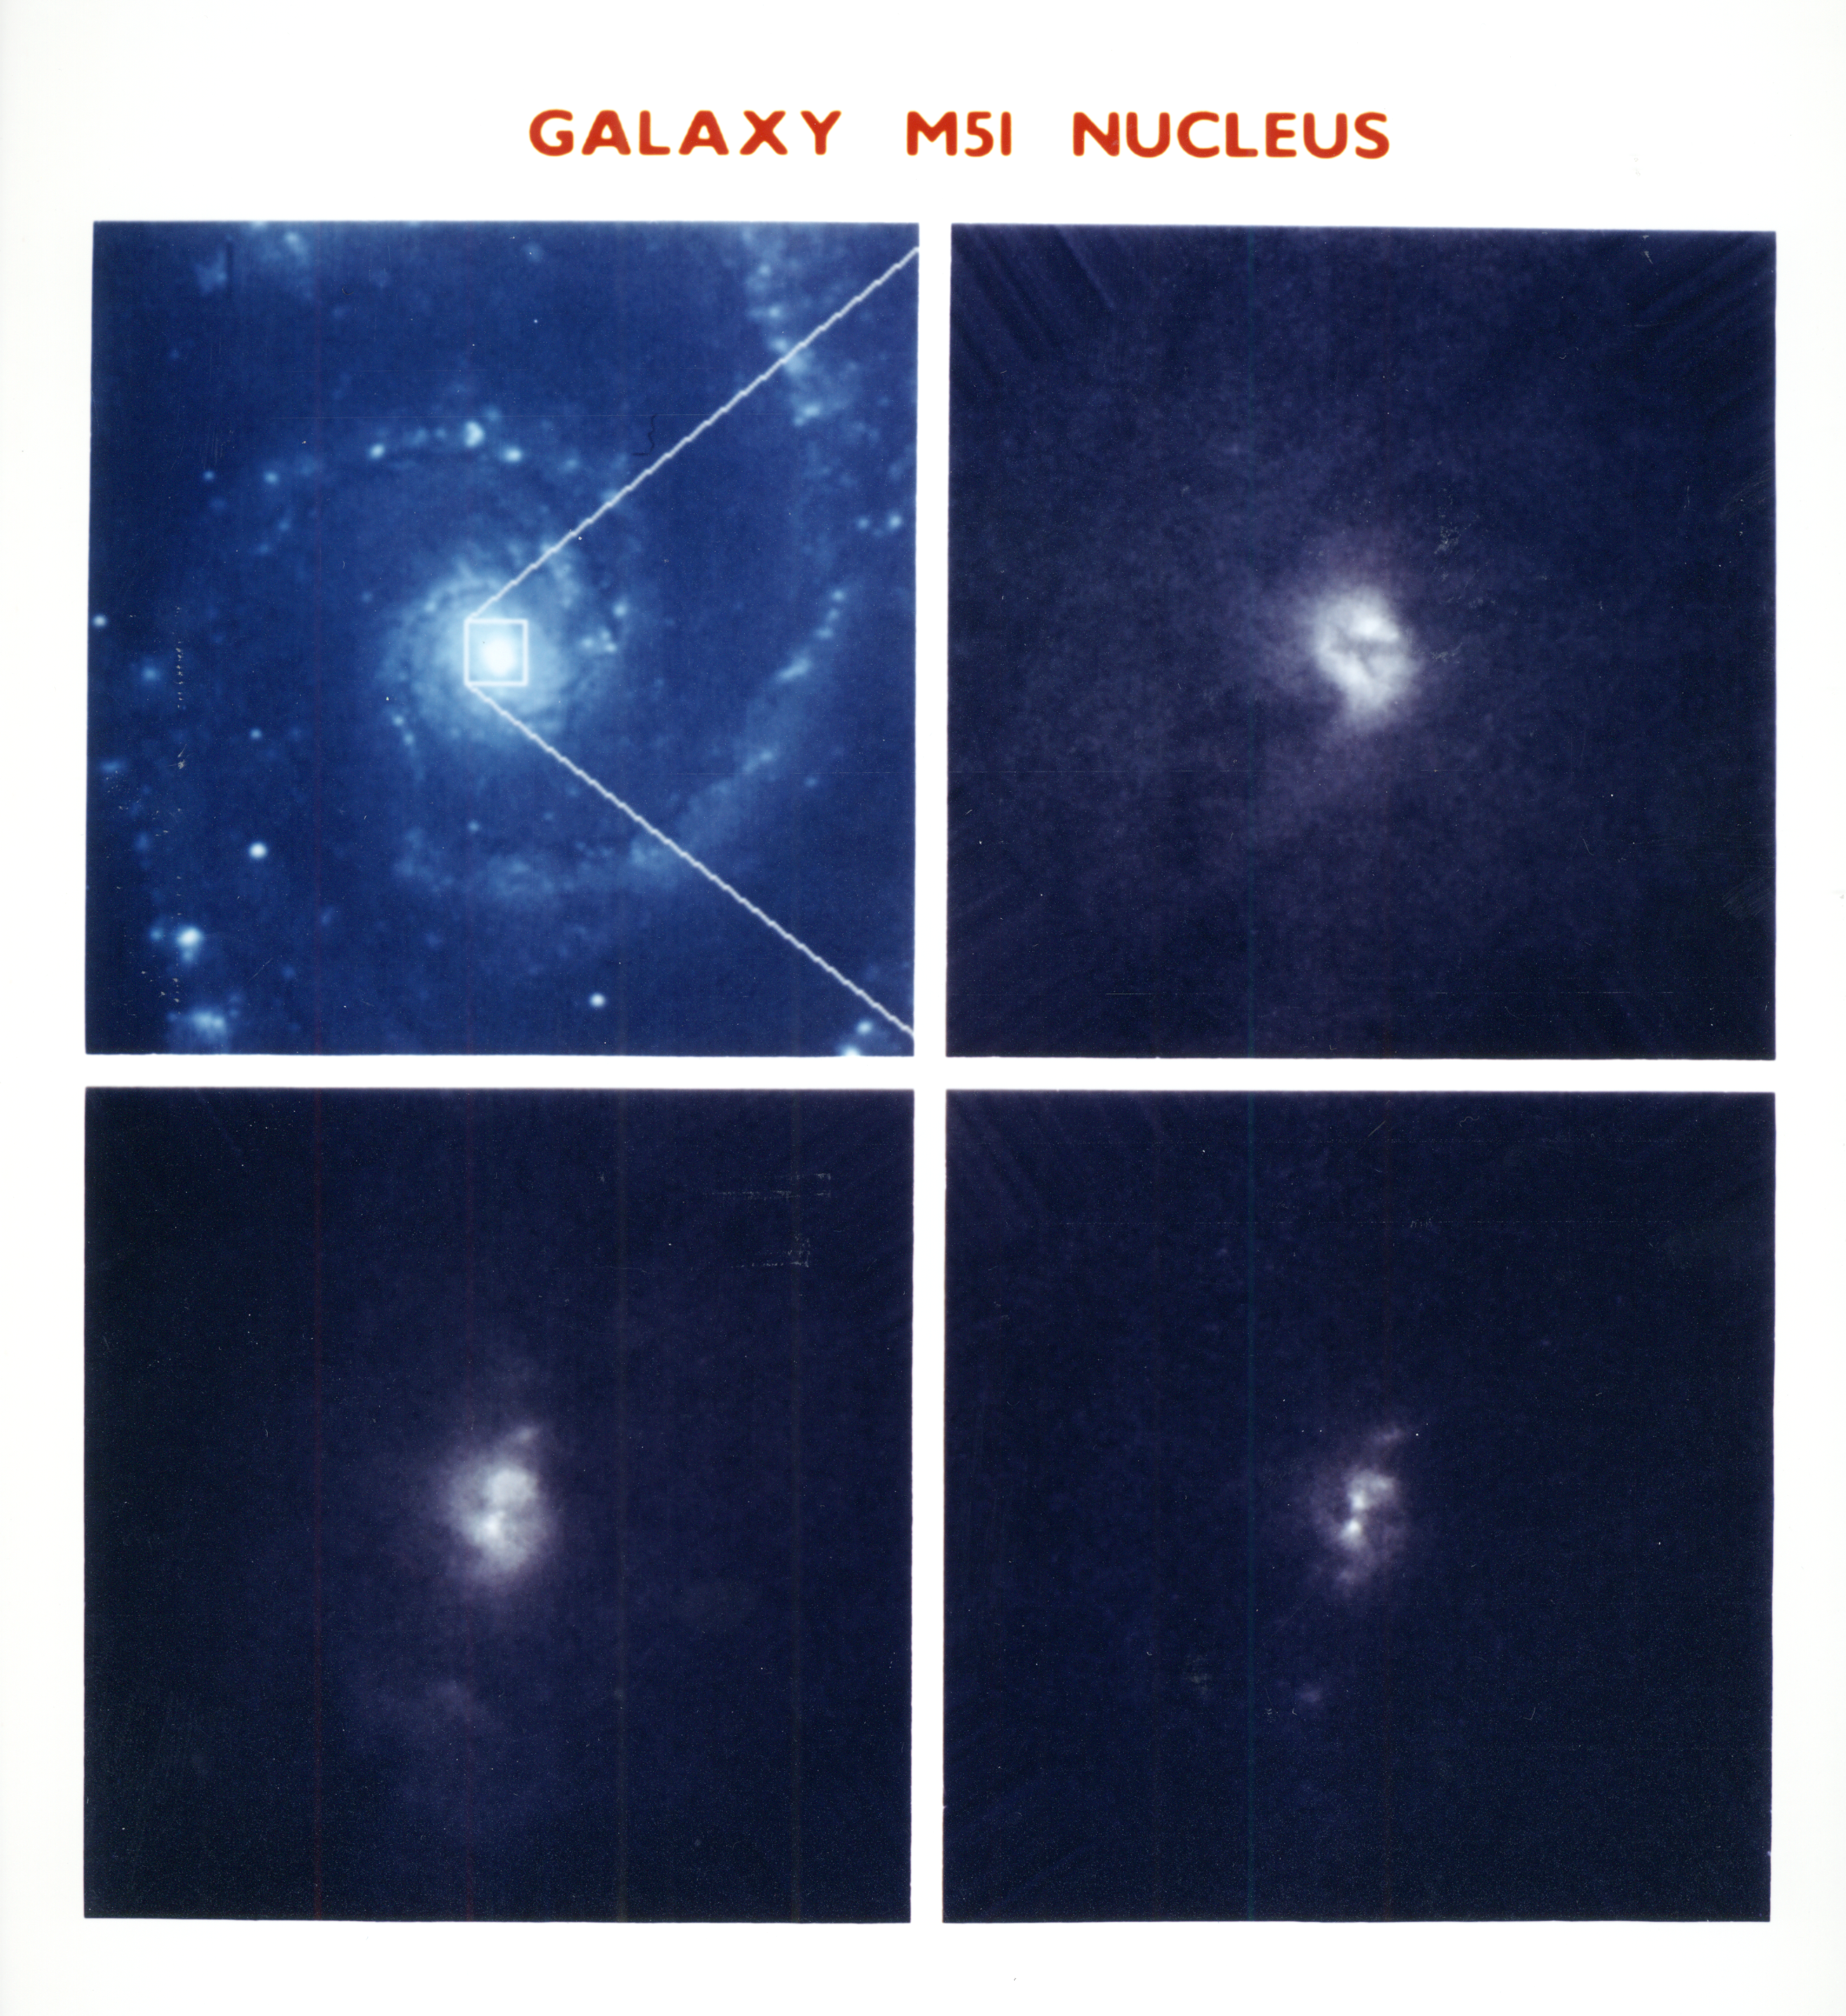

X structure at core of M51 whirlpool galaxy

(four-frame comparison)

Hubble Space Telescope provides a detailed look at the core of the giant spiral galaxy M51. These images, taken at different wavelengths of light, reveal complex structure and detail in the galaxy's core, which is thought to hide a massive black hole.

Credit: H. Ford (JHU/STScI), the Faint Object Spectrograph IDT, and NASA/ESA